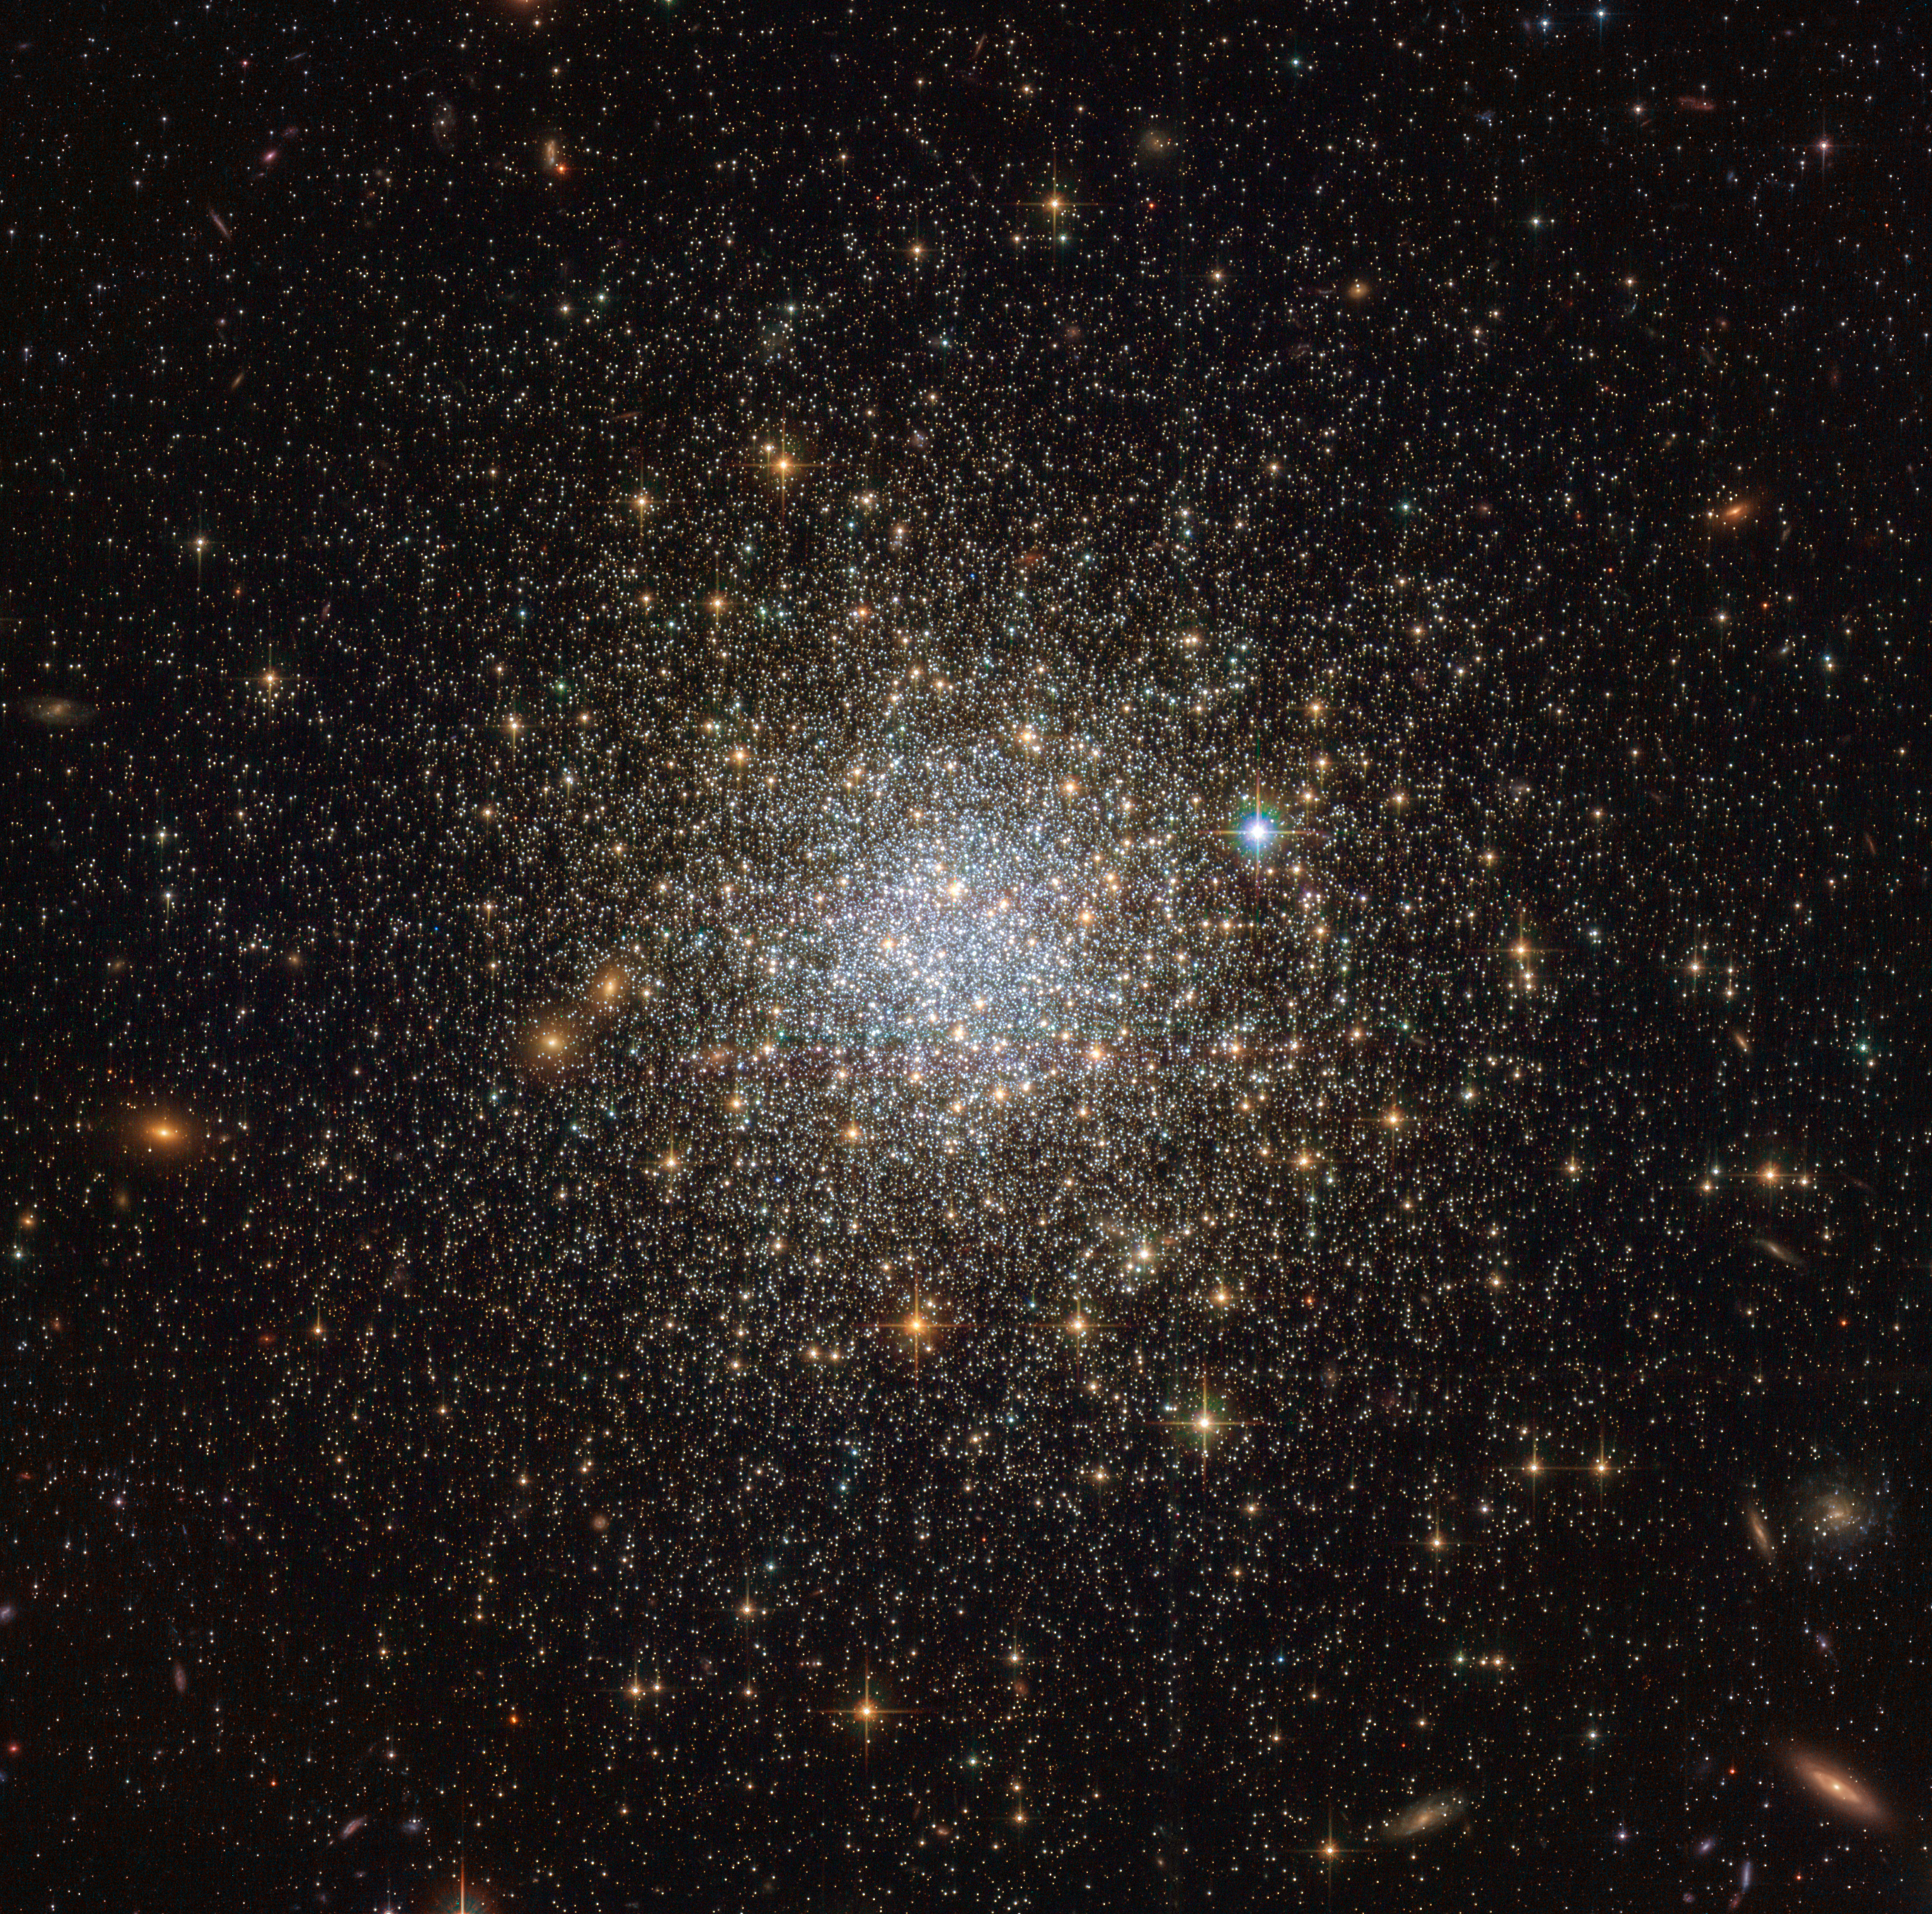

Globular Cluster NGC 1466

This image from the NASA/ESA Hubble Space Telescope reveals an ancient, glimmering ball of stars called NGC 1466. It is a globular cluster — a gathering of stars all held together by gravity — that is slowly moving through space on the outskirts of the Large Magellanic Cloud, one of our closest galactic neighbours.

NGC 1466 certainly is one for extremes. It has a mass equivalent to roughly 140 000 Suns and an age of around 13.1 billion years, making it almost as old as the Universe itself. This fossil-like relic from the early Universe lies some 160 000 light-years away from us.

NGC 1466 is one of the 5 clusters in the LMC in which the level of dynamical evolution (or "dynamical age") was measured.

Credit: ESA/Hubble & NASA